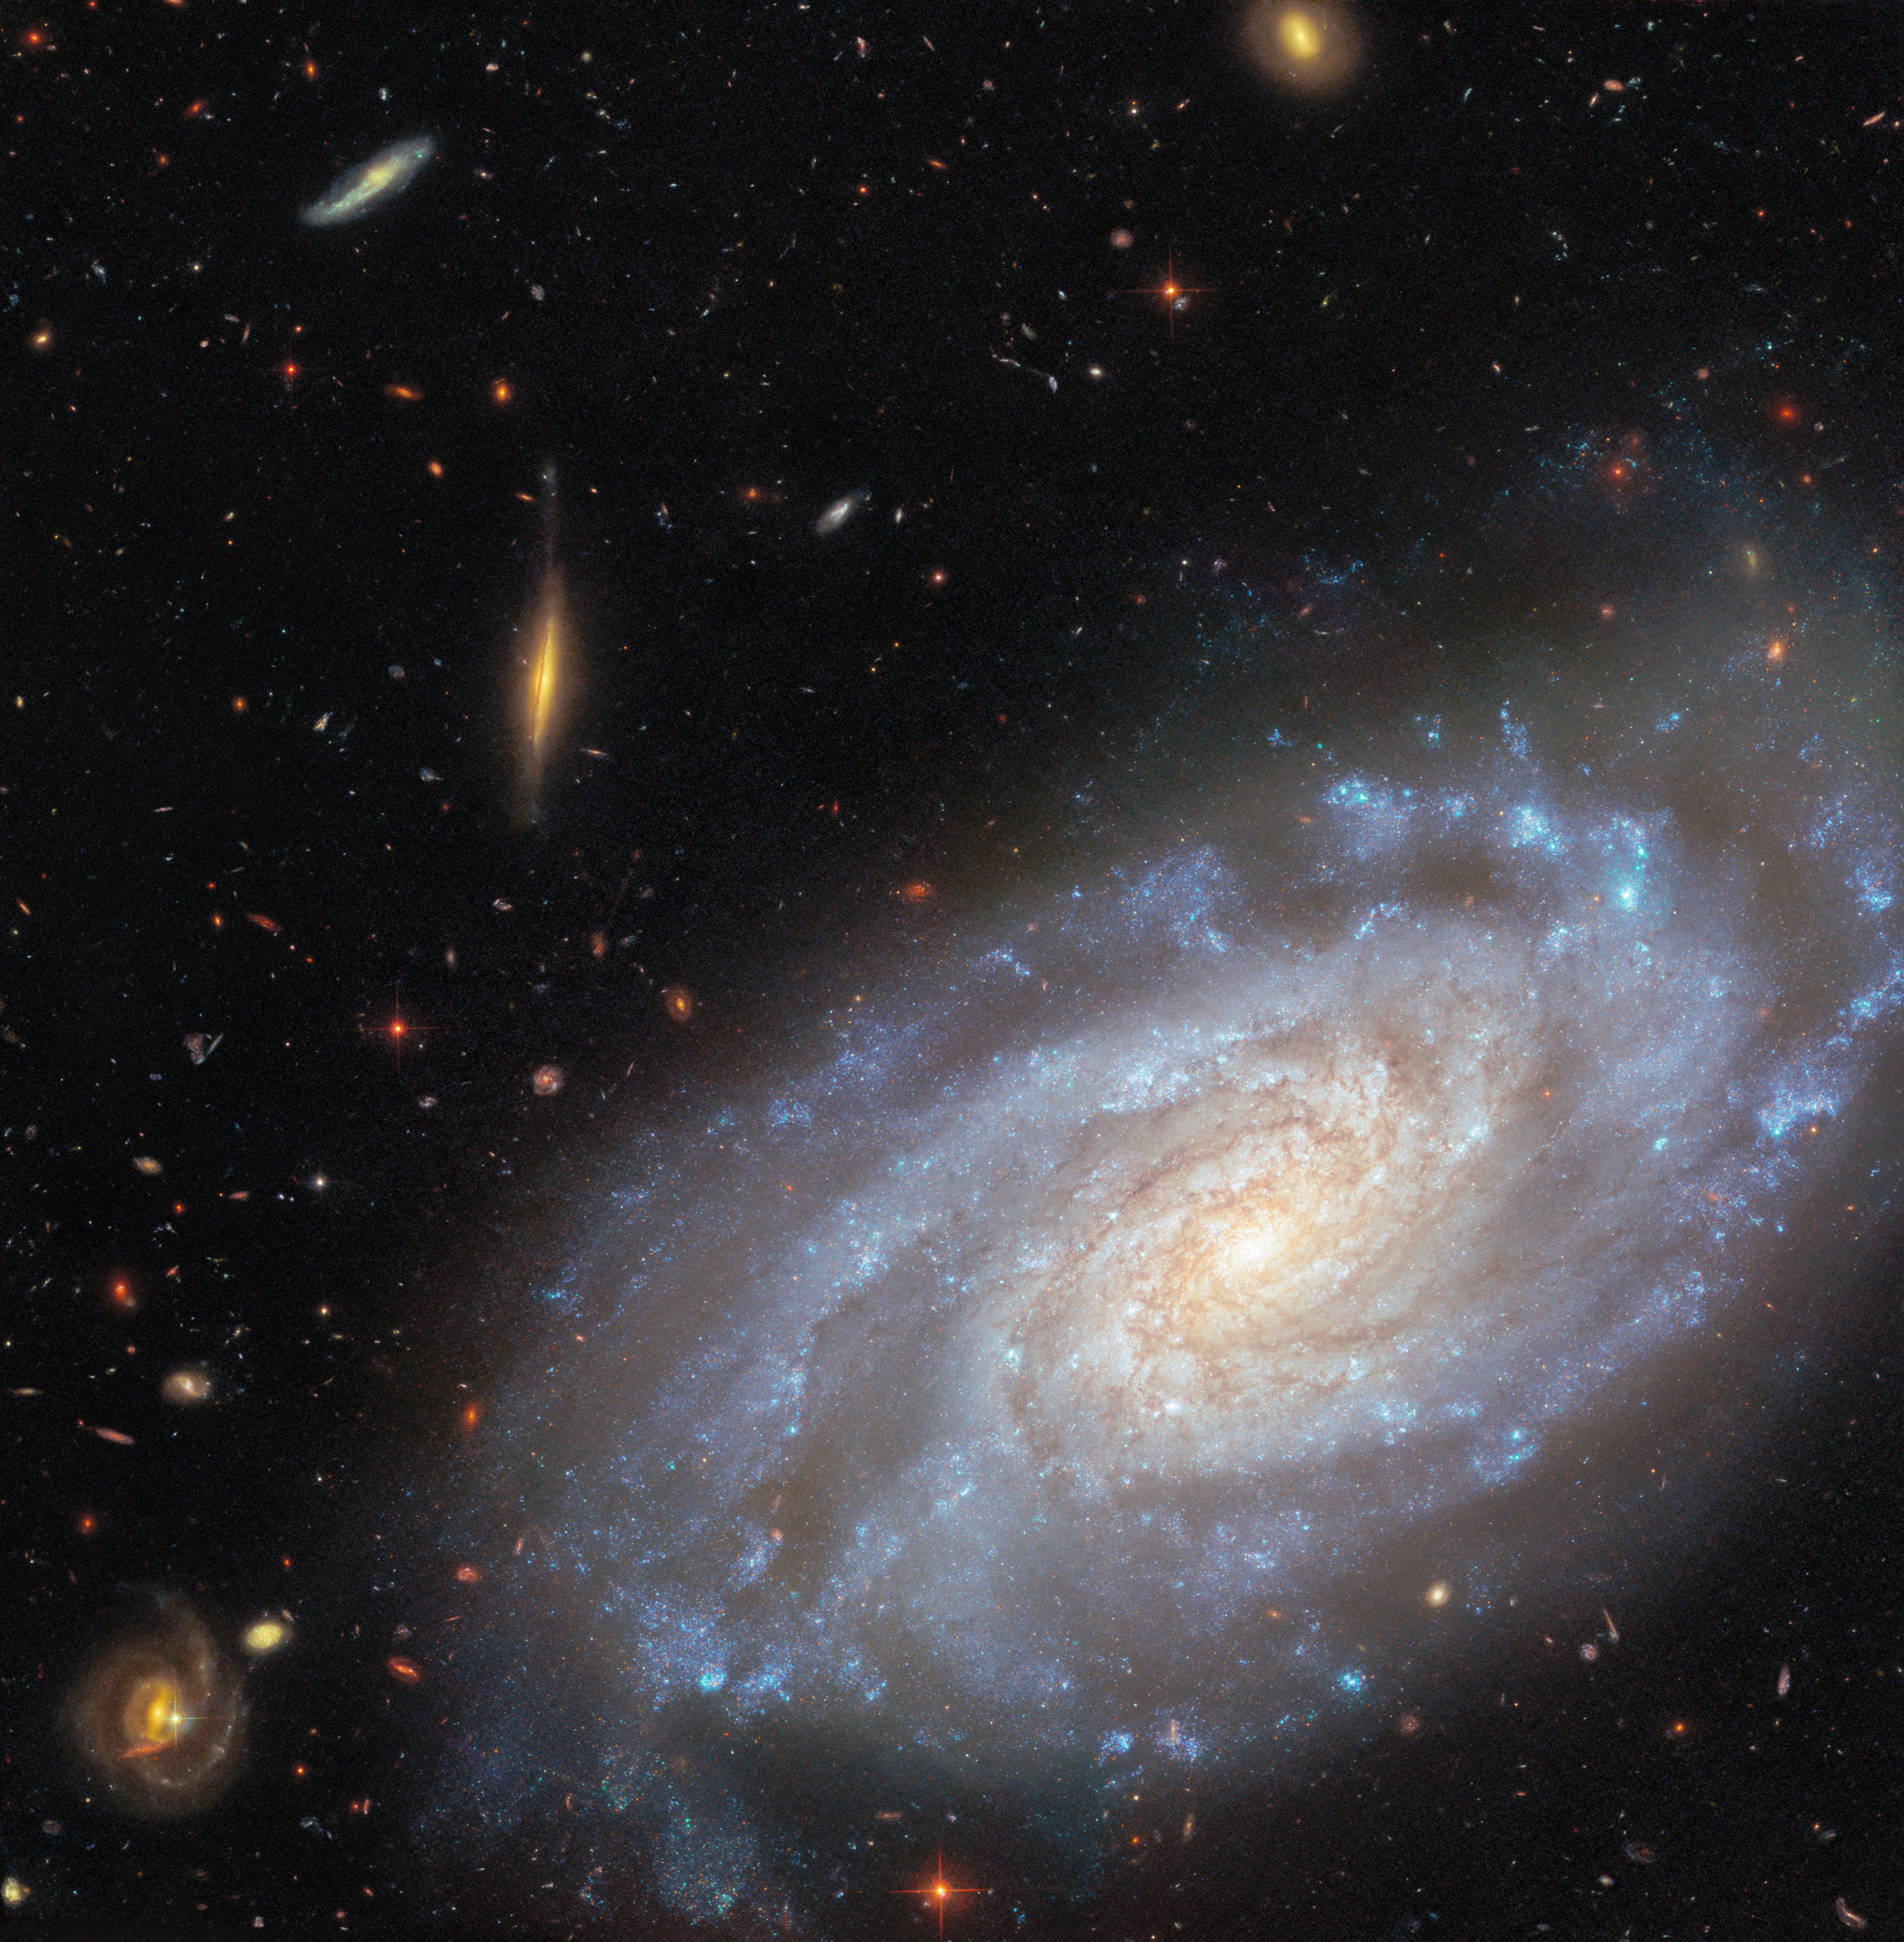

NGC 3370 (wide view)

Today’s ESA/Hubble Picture of the Week features a galaxy that Hubble has captured multiple times over more than 20 years. The galaxy is called NGC 3370, and it is a spiral galaxy located nearly 90 million light-years away in the constellation Leo (The Lion).

What is it about this galaxy that makes it a popular target for researchers? NGC 3370 is home to two kinds of objects that astronomers prize for their usefulness in determining distances to faraway galaxies: Cepheid variable stars and Type Ia supernovae.

Cepheid variable stars change in both size and temperature as they pulsate. As a result, the luminosity of these stars varies over a period of days to months. It does so in a way that reveals something important: the more luminous a Cepheid variable star is, the more slowly it pulsates. By measuring how long a Cepheid variable’s brightness takes to complete one cycle, astronomers can determine how bright the star actually is. Paired with how bright the star appears from Earth, this information gives the distance to the star and its home galaxy.

Type Ia supernovae provide a way to measure distances in a single explosive burst rather than through regular brightness variations. Type Ia supernovae happen when the dead core of a star ignites in a sudden flare of nuclear fusion. These explosions peak at very similar luminosities, and much like for a Cepheid variable star, knowing the intrinsic brightness of a supernova explosion allows for its distance to be measured. Observations of Cepheid variable stars and Type Ia supernovae are both critical for precisely measuring how fast our Universe is expanding.

A previous Hubble image of NGC 3370 was released in 2003. The image released today zooms in on the galaxy, presenting a richly detailed view that incorporates wavelengths of light that were not included in the previous version. NGC 3370 is a member of the NGC 3370 group of galaxies along with other Hubble targets NGC 3447 and NGC 3455.

Credit: ESA/Hubble & NASA, A. Riess, K. Noll